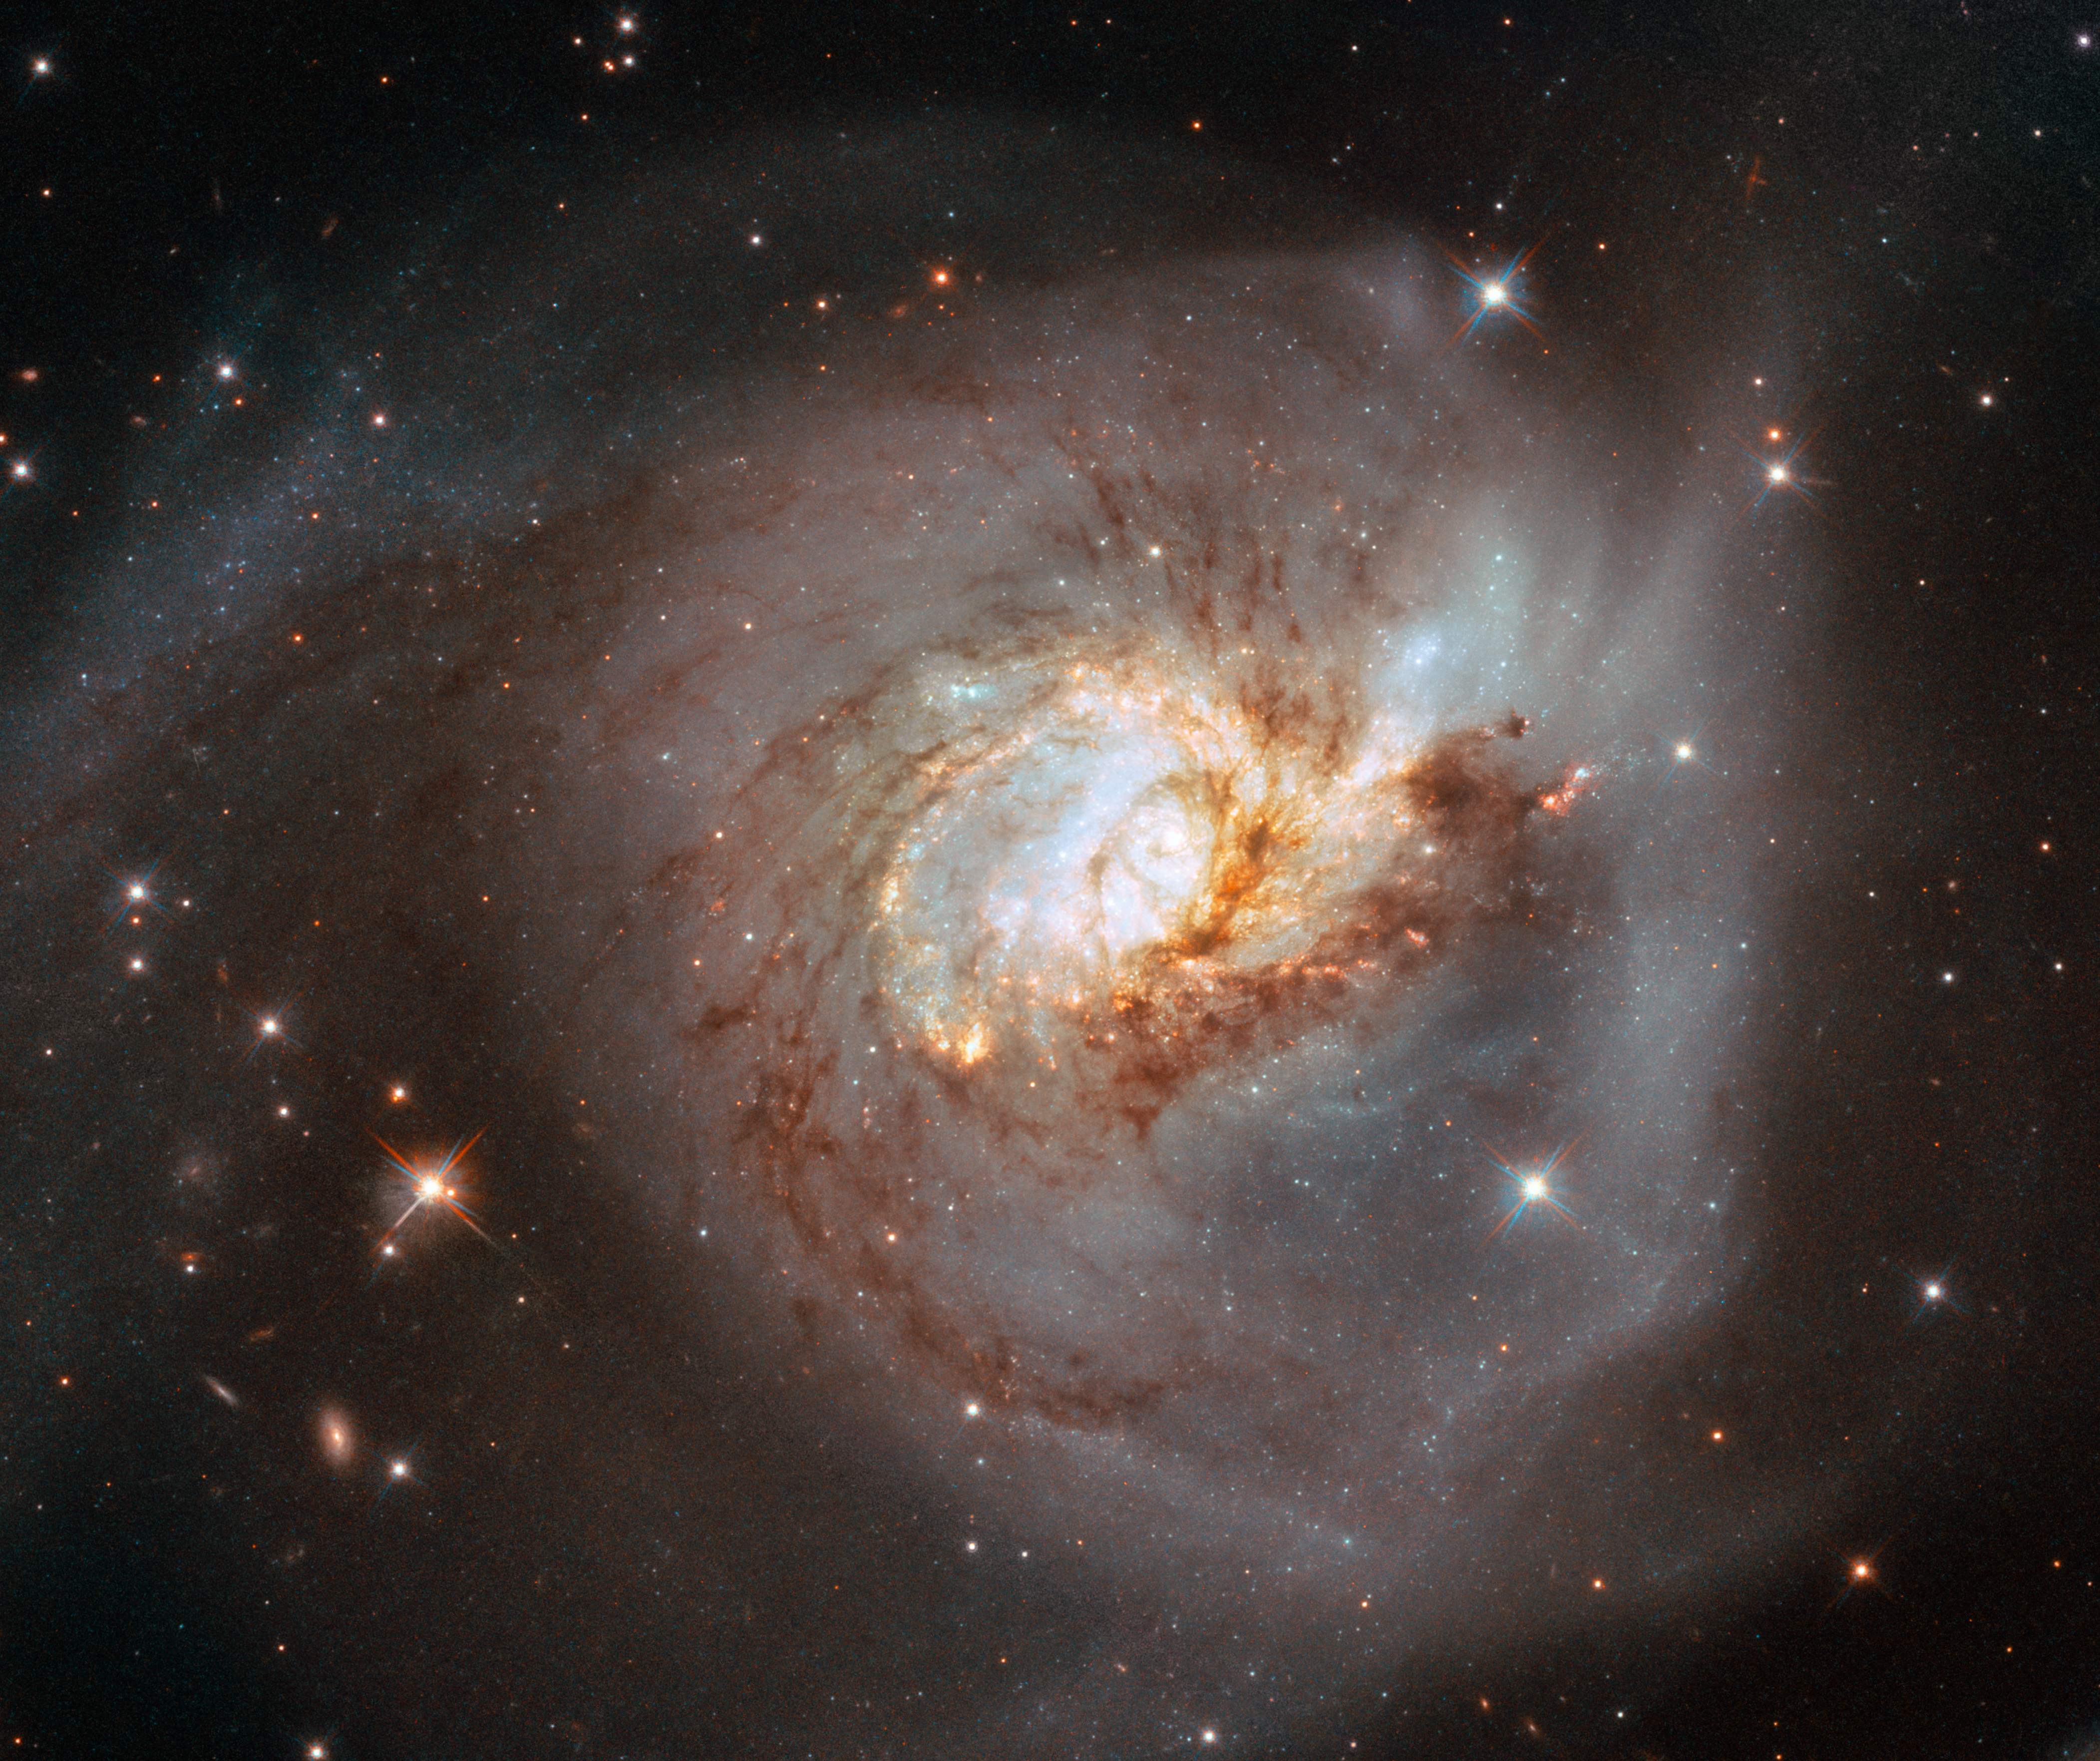

NGC 3256 (HST)

The peculiar galaxy NGC 3256 takes centre stage in this image from the NASA/ESA Hubble Space Telescope. This distorted galaxy is the wreckage of a head-on collision between two spiral galaxies which likely occurred 500 million years ago, and it is studded with clumps of young stars which were formed as gas and dust from the two galaxies collided.

This image contains data from Hubble’s Advanced Camera for Surveys and Wide Field Camera 3. In contrast to the infrared-light image, this visible image lays out in detail the dark threads of dust and molecular gas that spin around the centres of the two merged galaxies. Hot, massive stars in the two nuclei shine brightly, giving a bluish colour to the core, even though the galaxy is more bright overall in infrared wavelengths. The image was originally released in 2018.

Credit: ESA/Hubble, NASA